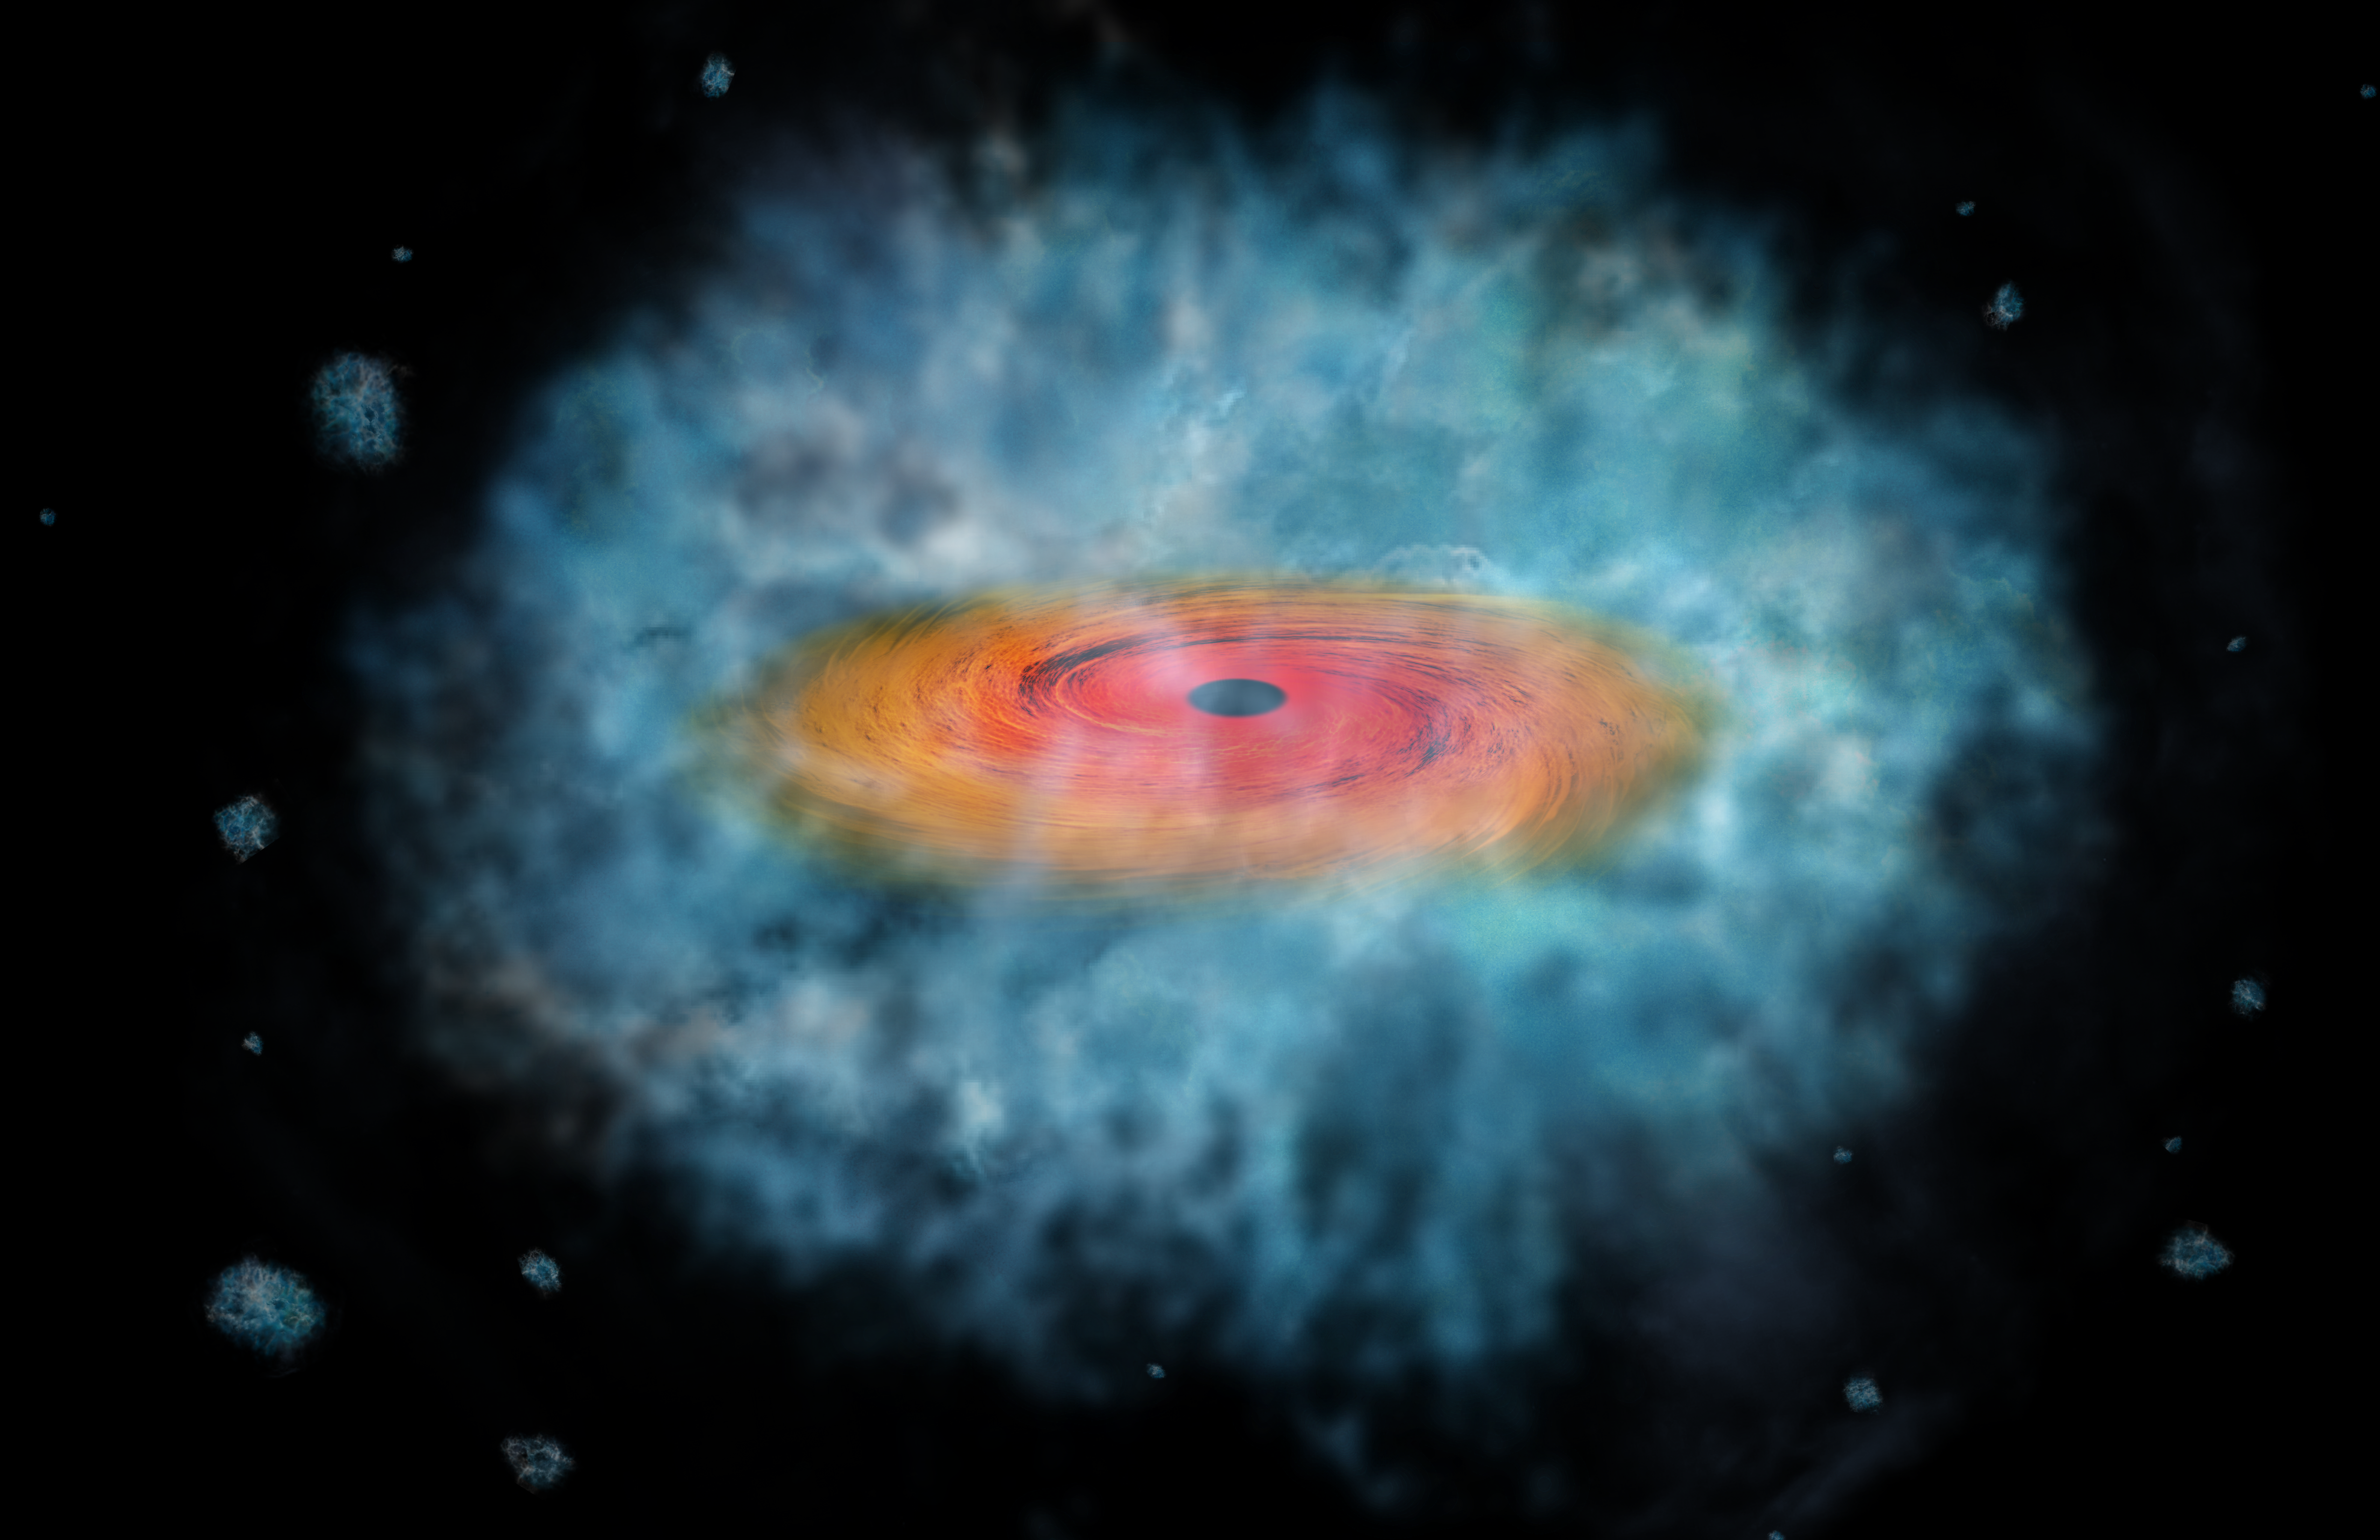

Artist’s impression of supermassive black hole seed

This artist’s impression shows a possible seed for the formation of a supermassive black hole. Two of these possible seeds were discovered by an Italian team, using three space telescopes: the NASA Chandra X-ray Observatory, the NASA/ESA Hubble Space Telescope, and the NASA Spitzer Space Telescope.

Credit: NASA/CXC/M. Weiss